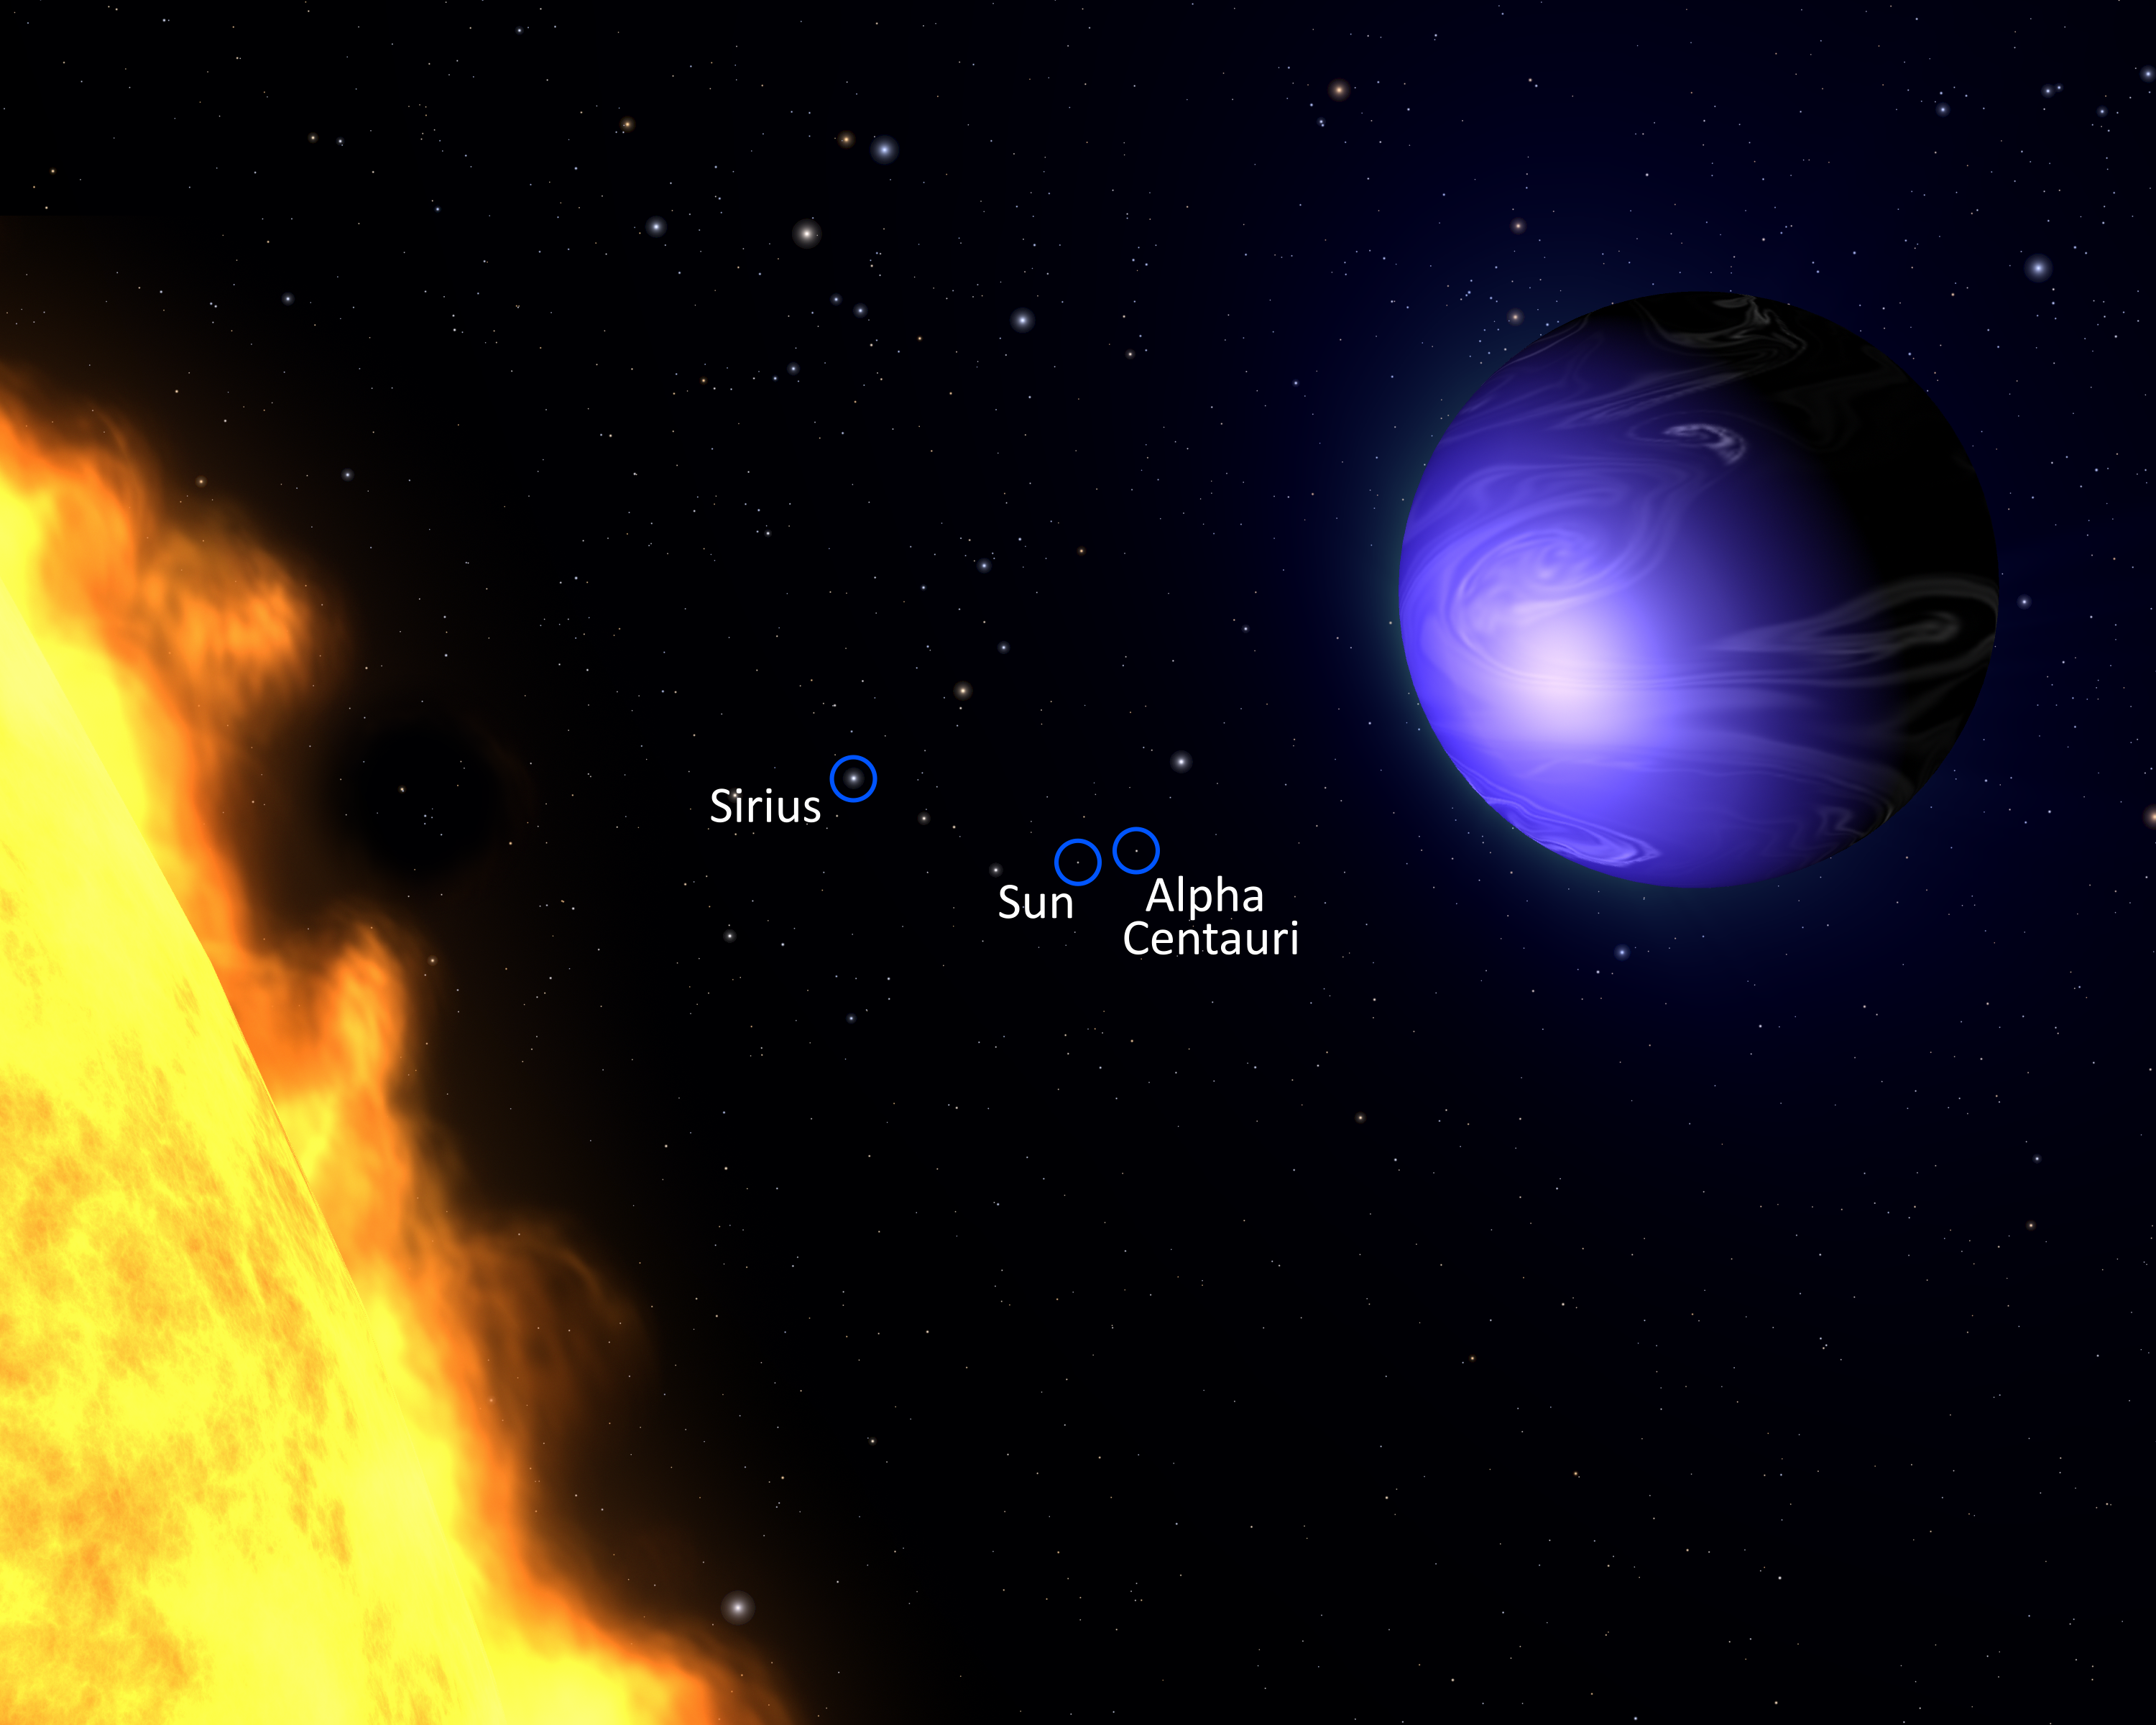

Exotic blue planet HD 189733b (labelled artist’s impression)

This illustration shows a "hot Jupiter" planet known as HD 189733b orbiting its star, HD 189733. The NASA/ESA Hubble Space Telescope measured the actual visible light colour of the planet, which is deep blue. This colour is not due to the presence of oceans, but is caused by the effects of a scorching atmosphere where silicate particles melt to make "raindrops" of glass that scatter blue light more than red light.

Because the planet is only 63 light-years from Earth, a visitor would see many of the same stars we see in our nighttime sky, though the constellation patterns would be different. Our Sun and the nearest star to our Sun, Alpha Centauri, are labelled here – two faint stars near the centre of the image. Also labelled is Sirius, the brightest star in our skies in the constellation of Canis Major (The Greater Dog).

Credit: NASA, ESA, and G. Bacon (AURA/STScI)